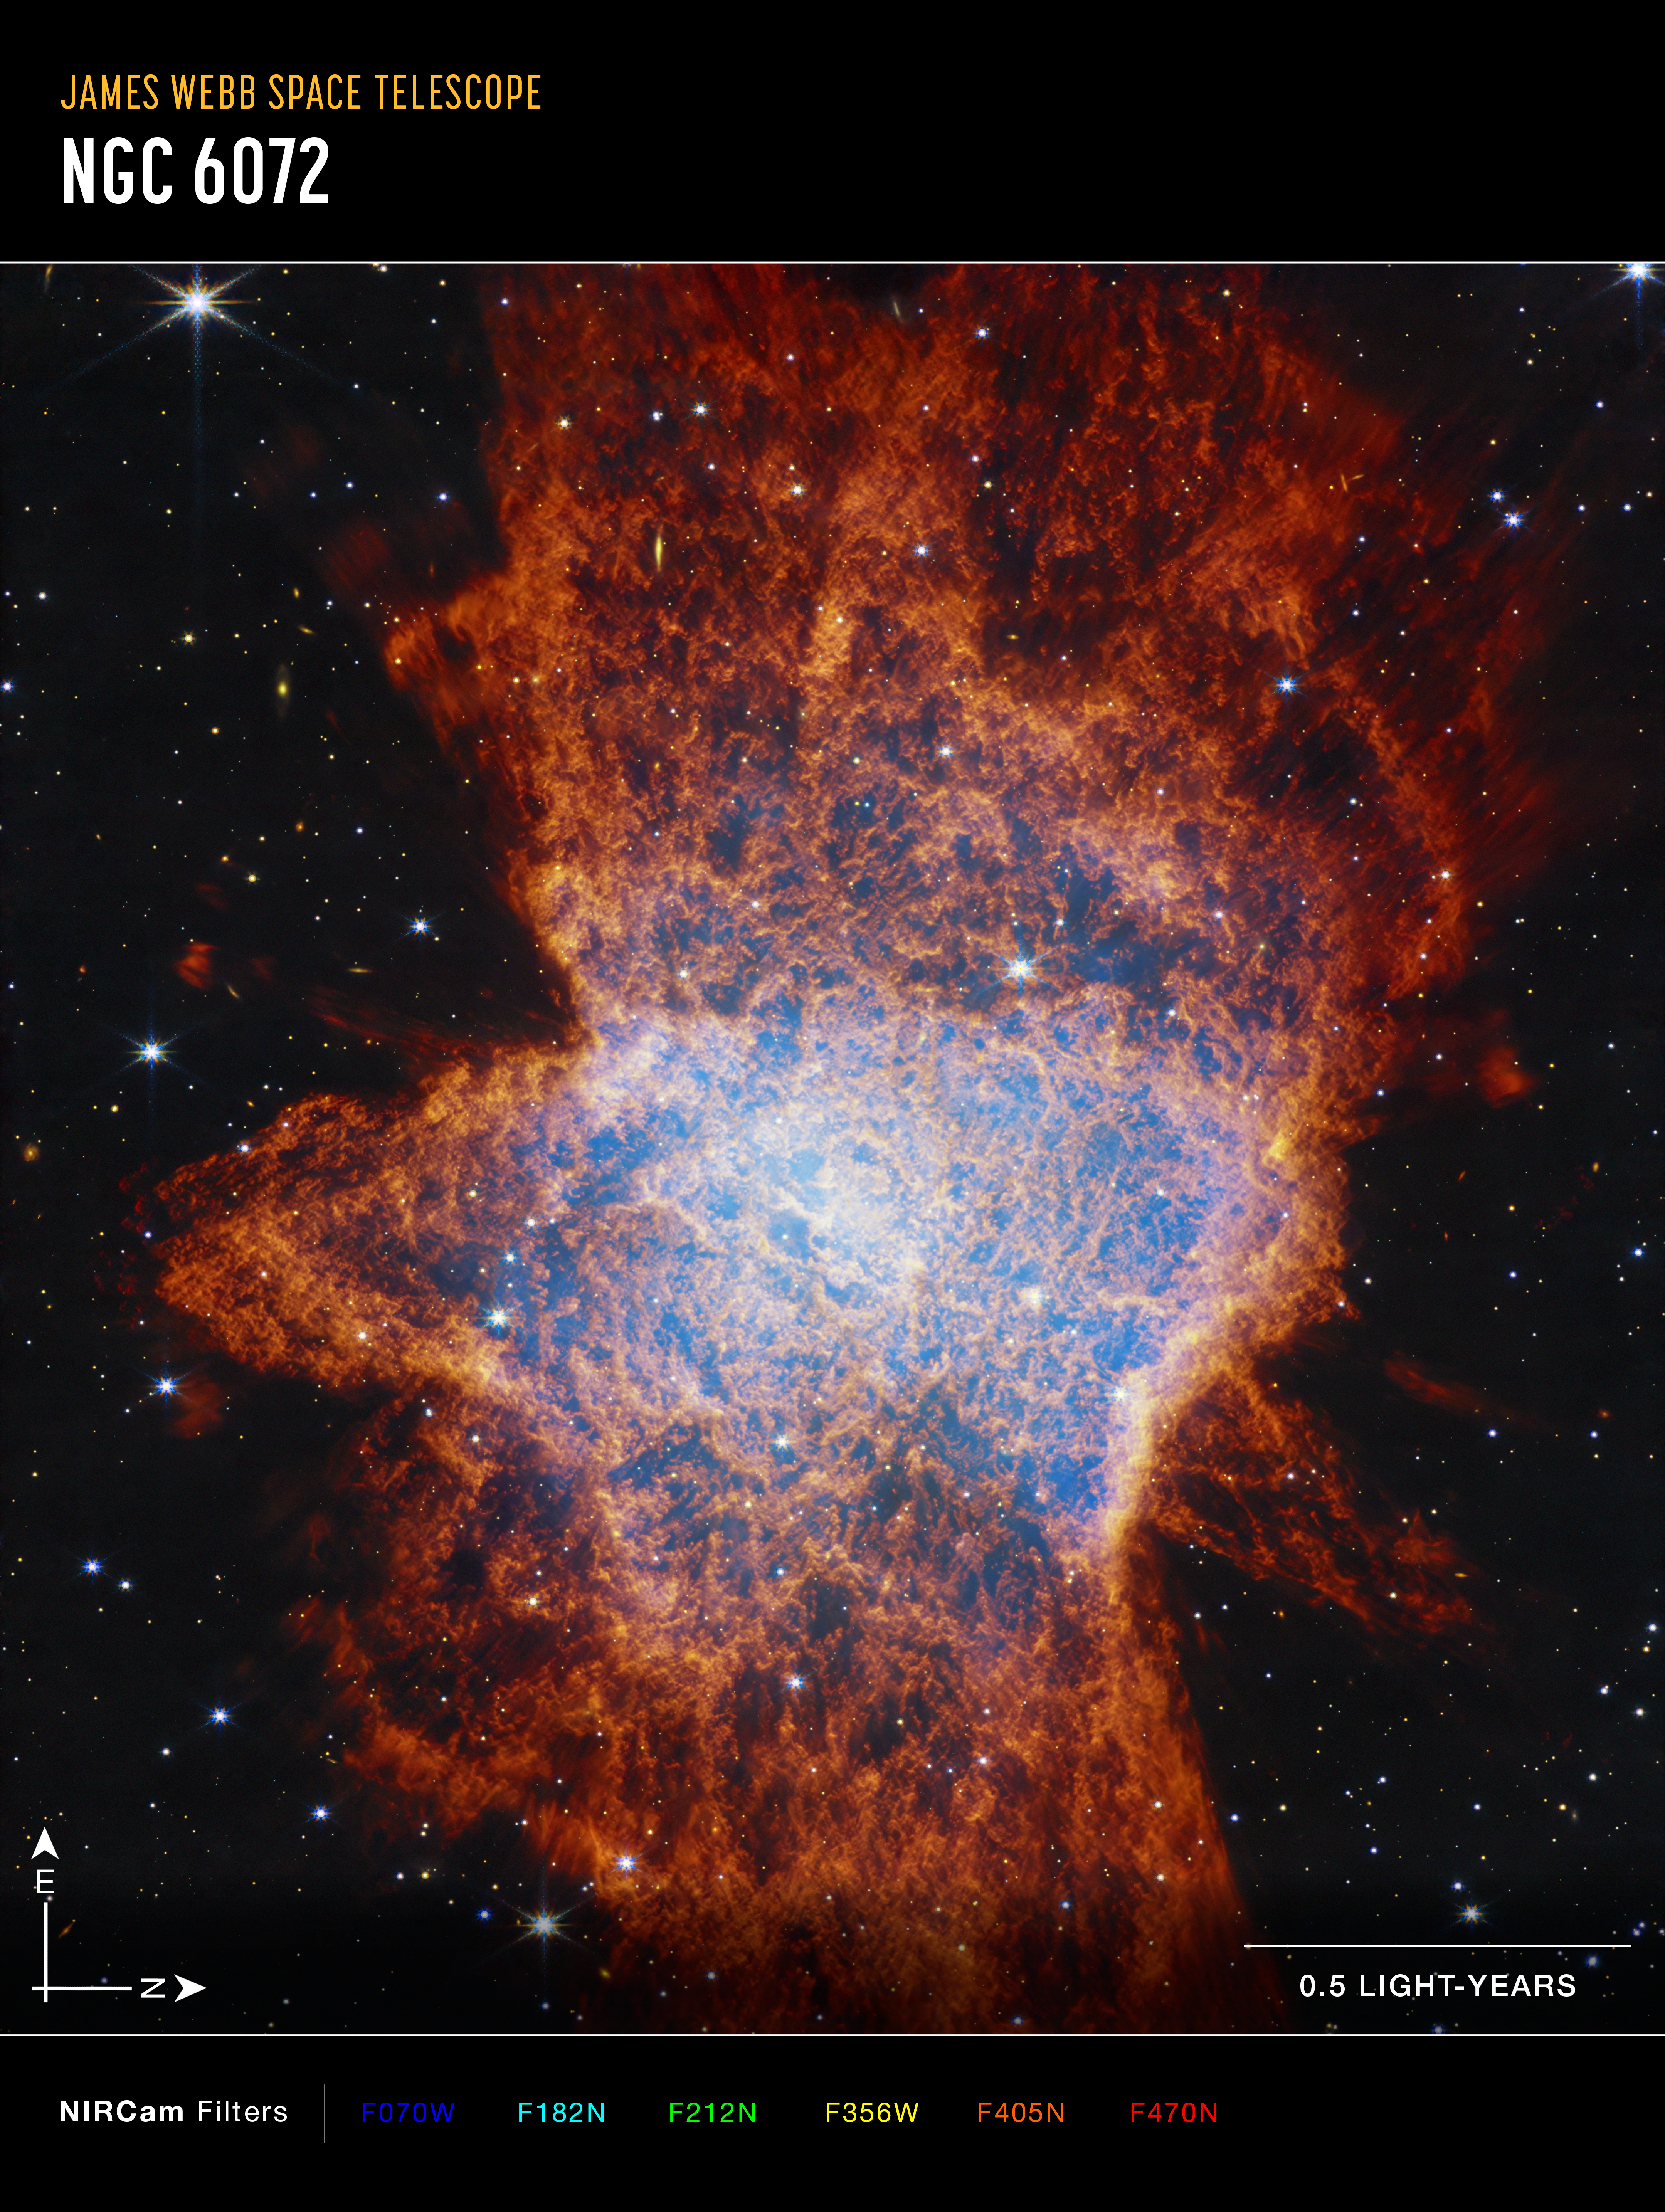

NGC 6072 (annotated NIRCam image)

This image of NGC 6072, captured by the James Webb Space Telescope’s NIRCam (Near-Infrared Camera), shows compass arrows, scale bar, and colour key for reference.
The north and east compass arrows show the orientation of the image on the sky. Note that the relationship between north and east on the sky (as seen from below) is flipped to the direction arrows on a map of the ground (as seen from above).

The scale bar is labeled in light-years, which is the distance that light travels in one Earth-year (it takes 0.5 years for light to travel a distance equal to the length of the scale bar). One light-year is equal to about 9.46 trillion kilometers.

This image shows invisible near-infrared wavelengths of light that have been translated into visible-light colours. The colour key shows which NIRCam filters were used when collecting the light. The colour of each filter name is the visible light colour used to represent the infrared light that passes through that filter.

Credit: NASA, ESA, CSA, STScI